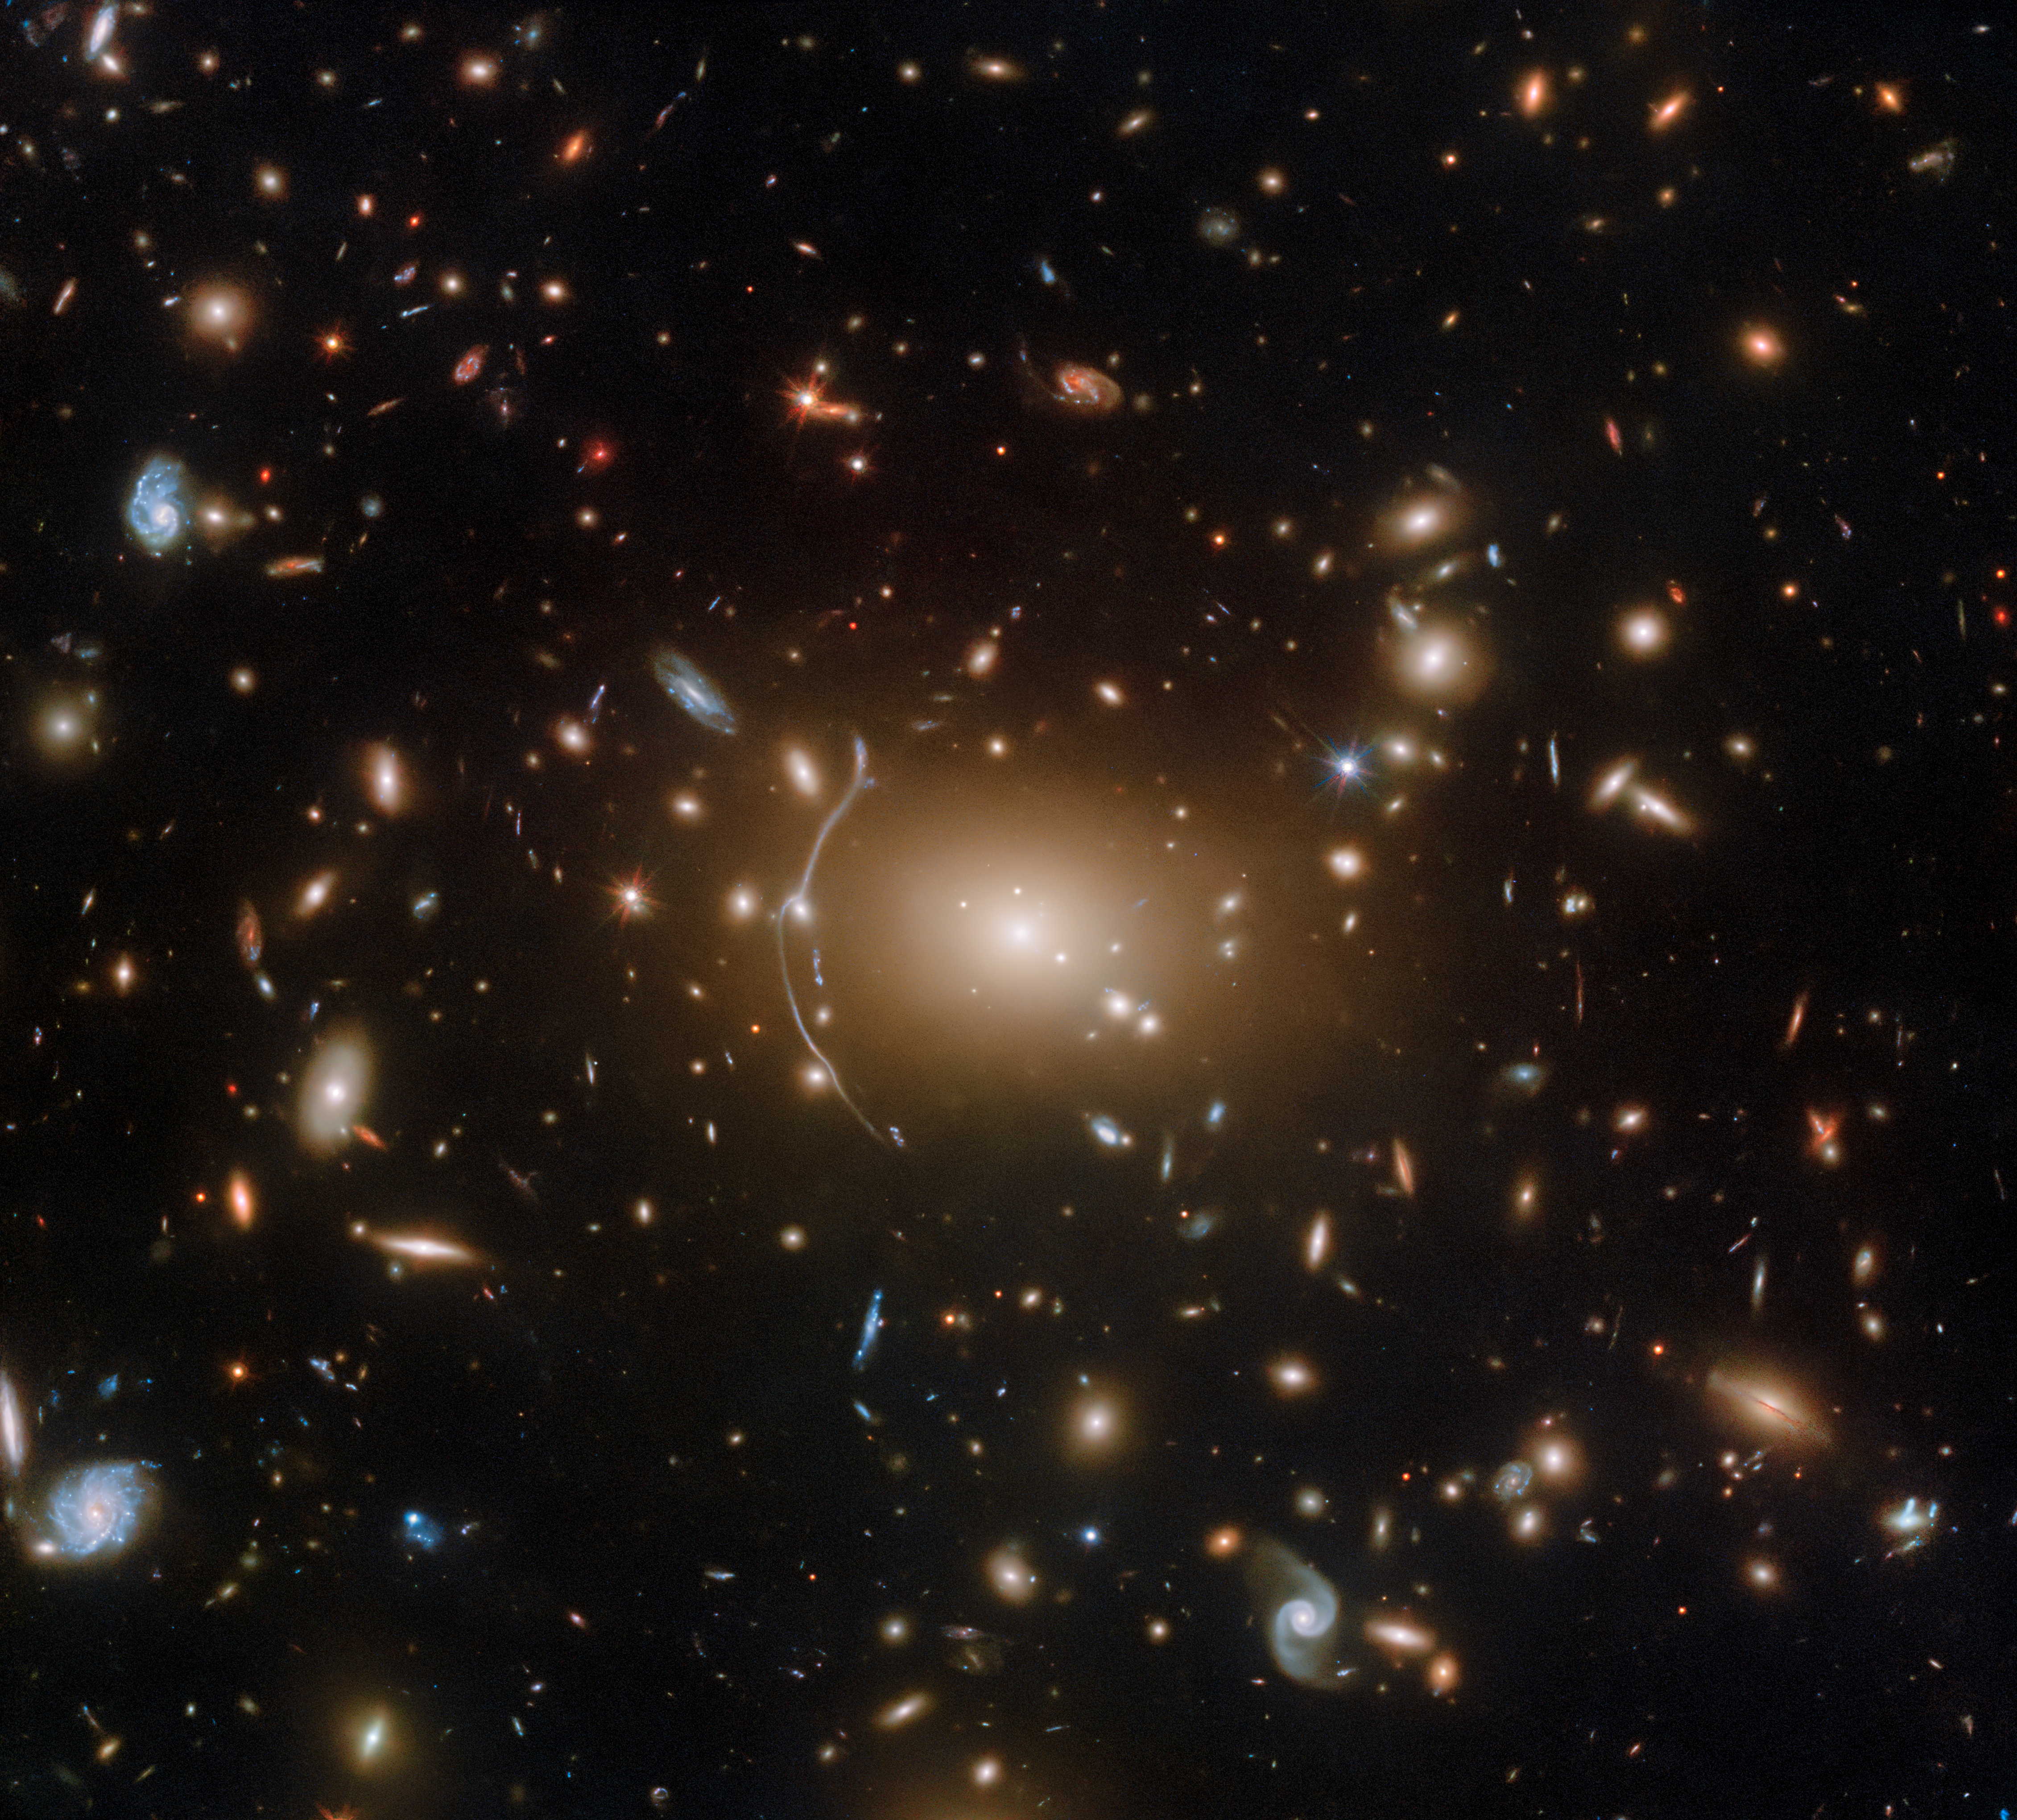

A Cosmic Cobweb

In celebration of Halloween, Hubble brings you this inky image of the galaxy cluster Abell 611, located roughly 3.2 billion light years from Earth.

This object is a popular target for investigating dark matter, in part because of the numerous examples of strong gravitational lensing visible amongst the cluster’s intricate web of galaxies.

Credit: ESA/Hubble, NASA, P. Kelly, M. Postman, J. Richard, S. Allen